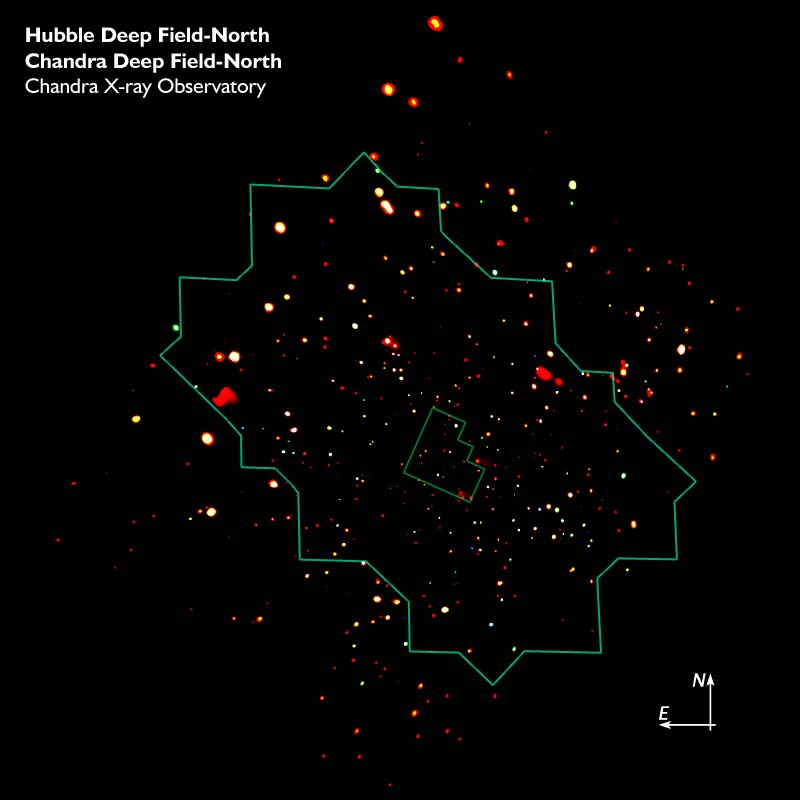

CDF-N CXO Image with Location of ACS Mosaic and WFPC2 HDF-N

The Chandra Deep Field North, showing the location of the ACS mosaic and the WFPC2 Hubble Deep Field North.

Credit: NASA, ESA, the Chandra Deep Field-North Team and Zolt Levay(STScI)